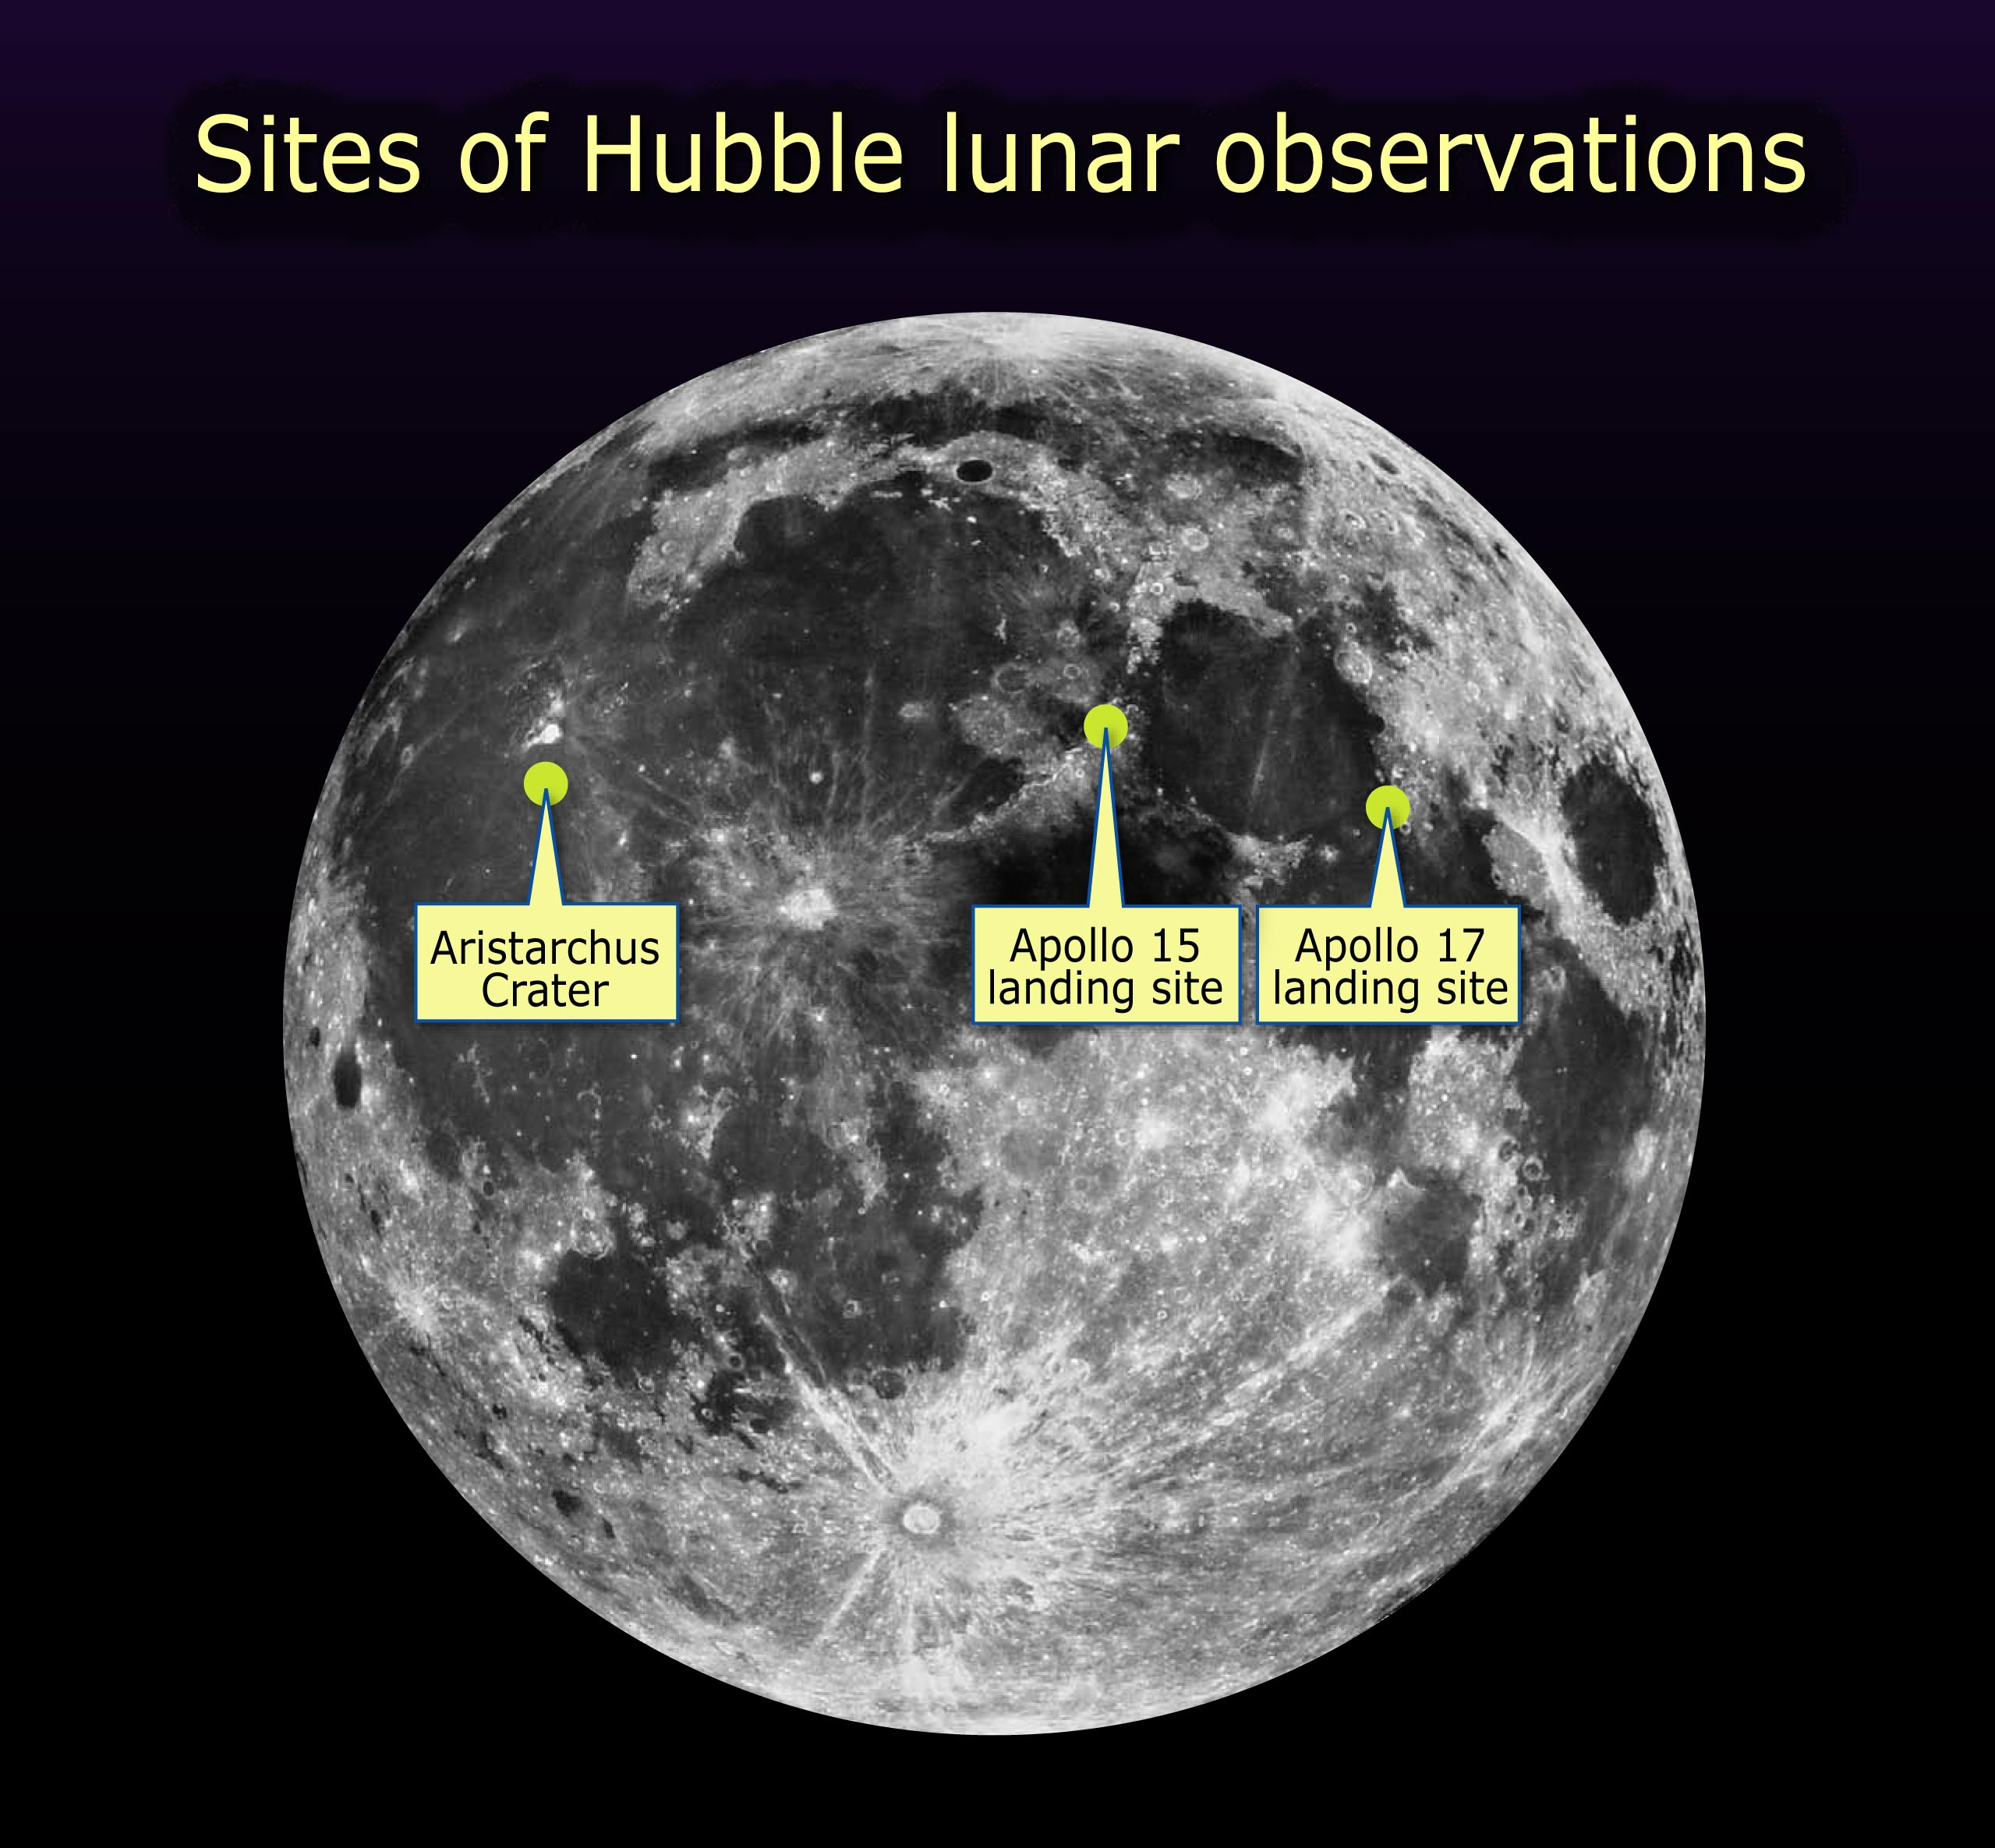

Sites of Hubble Lunar Observations

NASA's Hubble Space Telescope took ultraviolet and visible-light images of the Apollo 15 and 17 landing regions and the Aristarchus crater in Aug. 2005.

Credit: NASA, ESA, Lunar and Planetary Institute, and A. Feild (STScI)